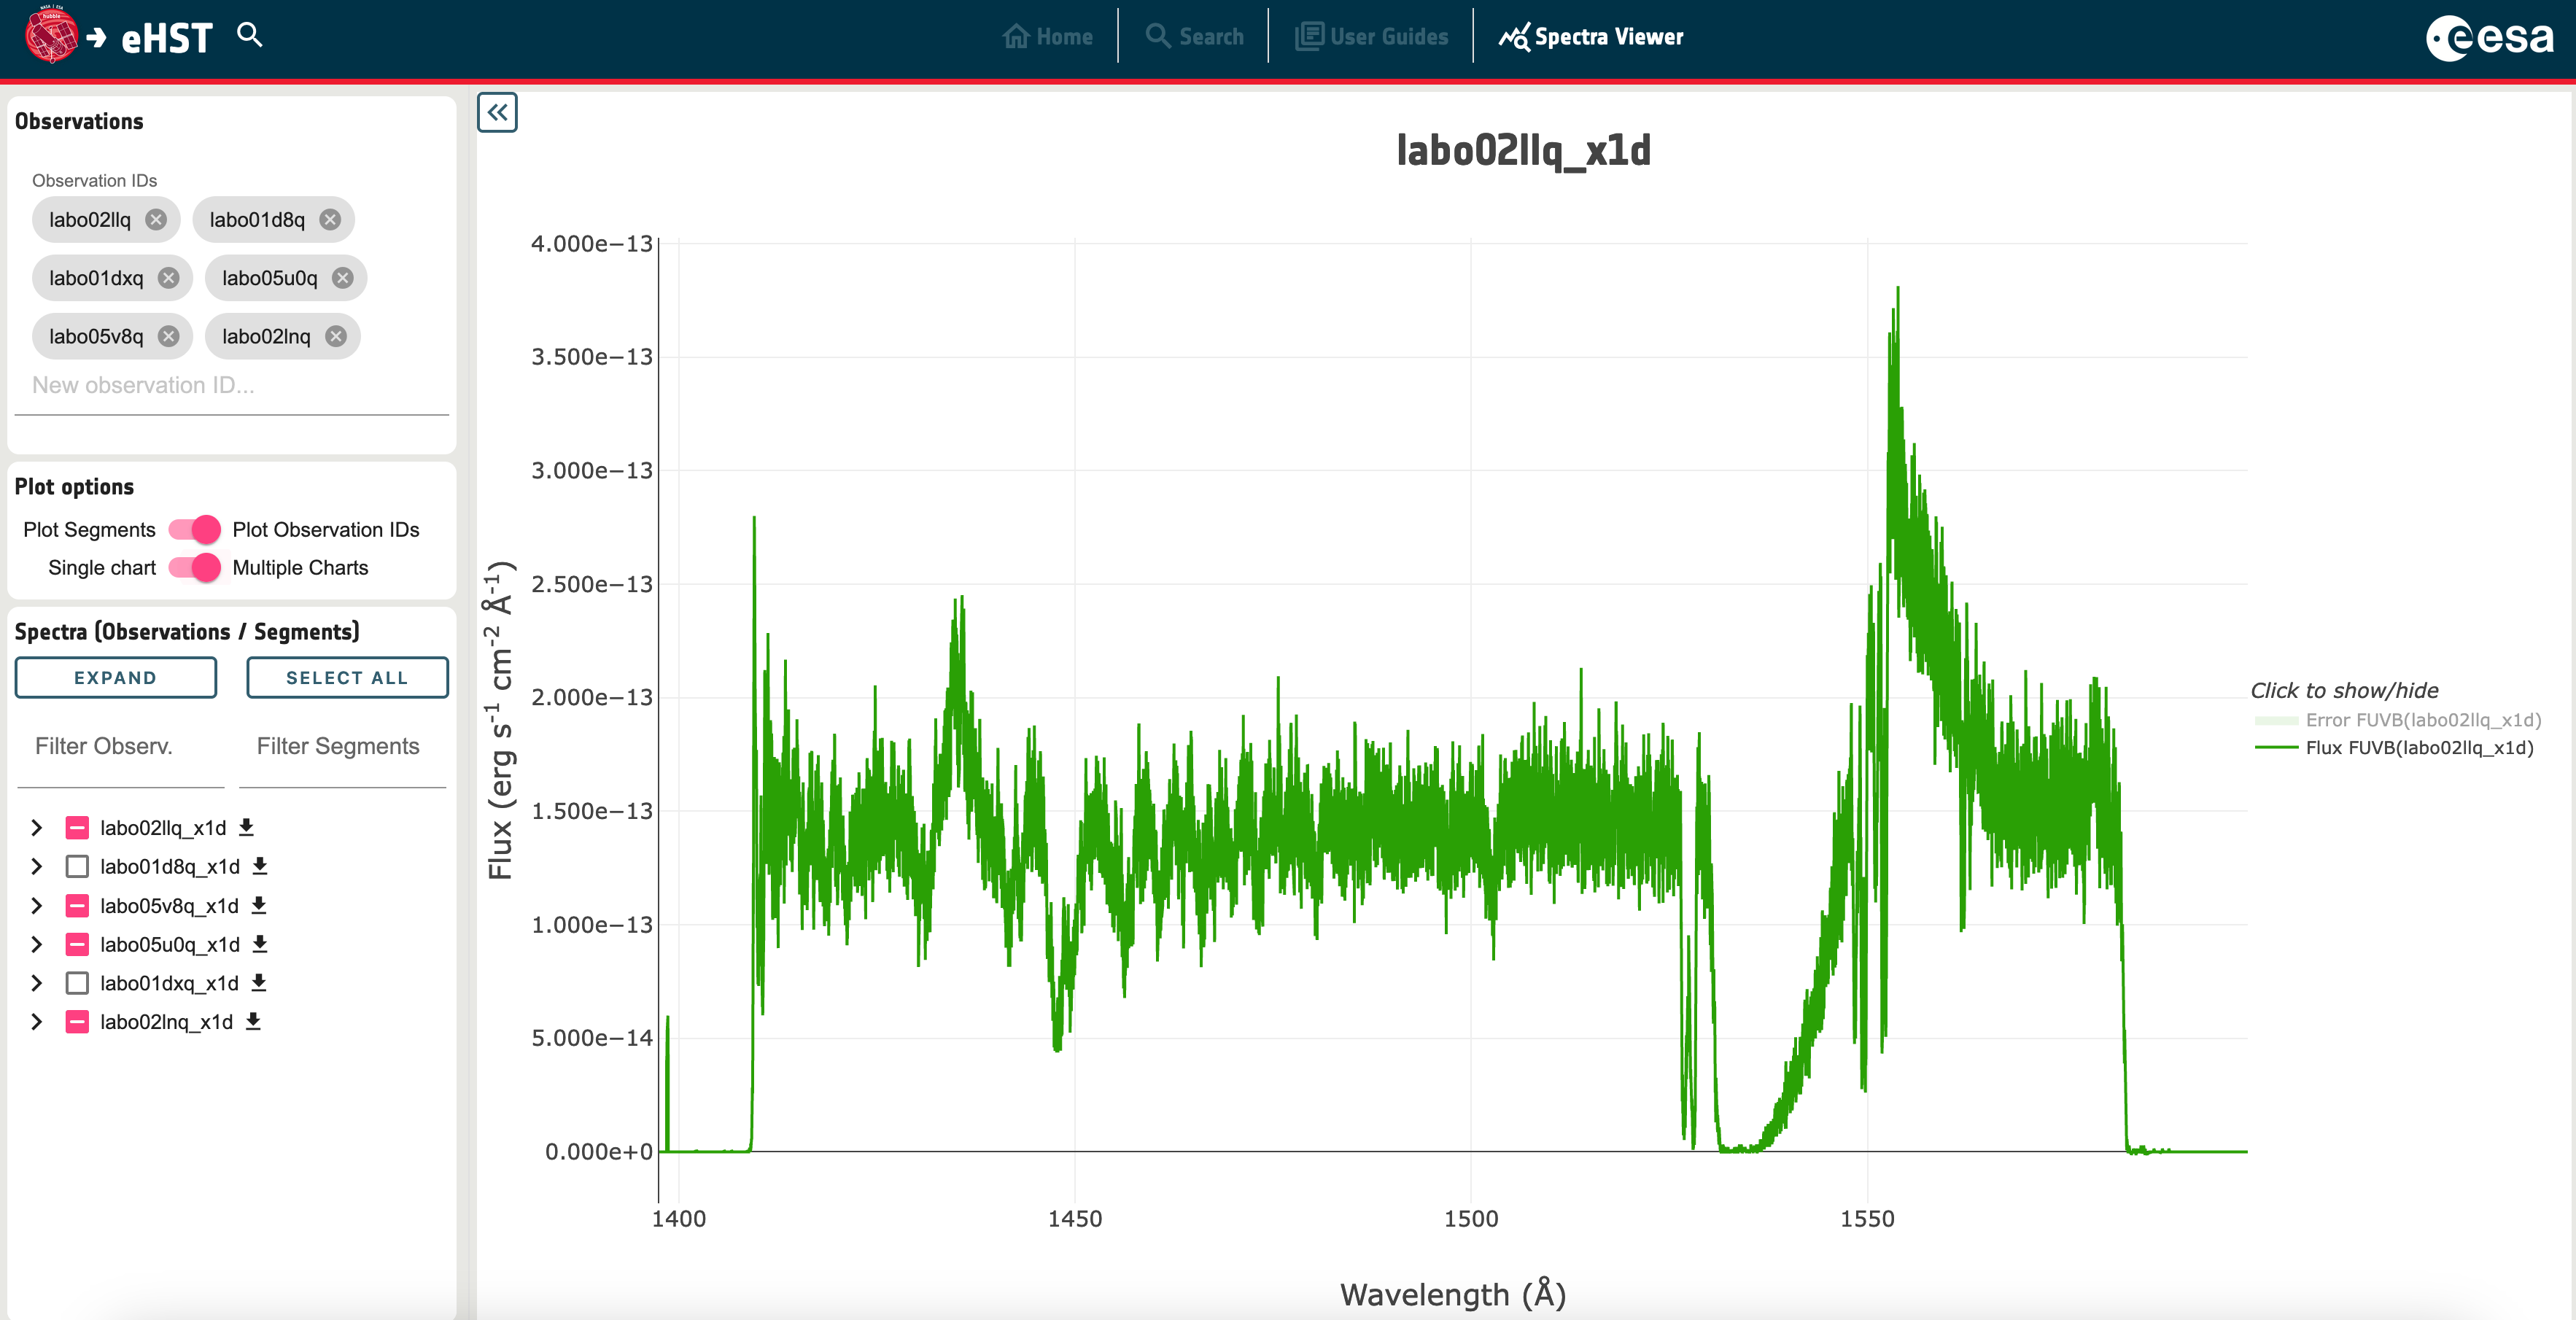

eHST Screenshot - spectral viewer

This image shows a screenshot from eHST of the new spectral viewer, showing one region of an example COS spectrum of a massive star in the Large Magellanic Cloud.

Credit: eHST